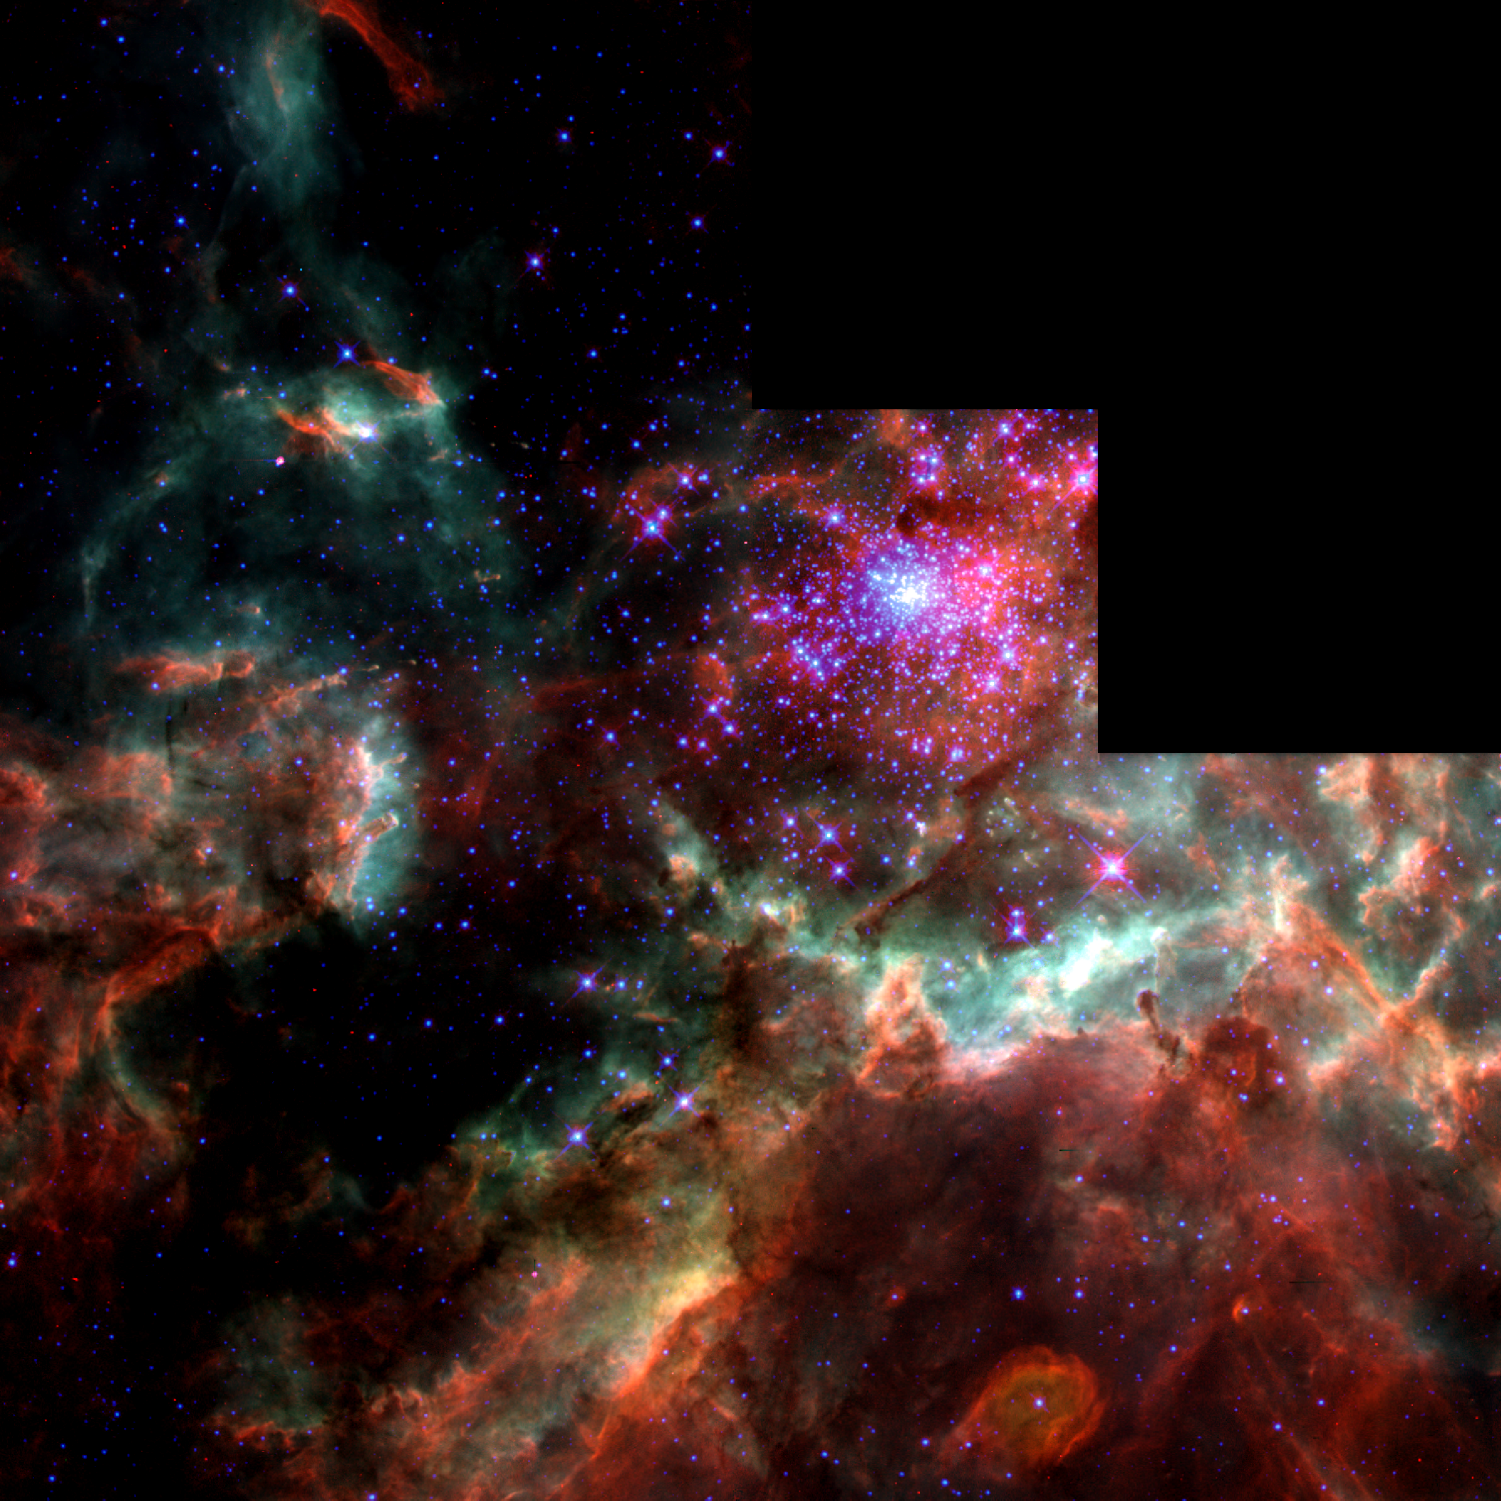

Star Cluster R136

The image shows the Star Cluster R136 in 30 Doradus.

Credit: NASA/ESA, STScI